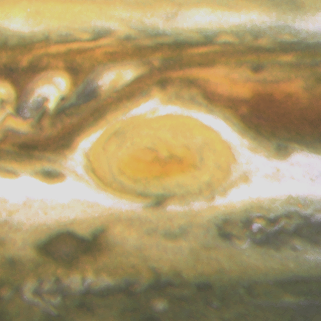

Jupiter's Great Red Spot

When 17th-century astronomers first turned their telescopes to Jupiter, they noted a conspicuous reddish spot on the giant planet. This Great Red Spot is still present in Jupiter's atmosphere, more than 300 years later. It is now known that it is a vast storm, spinning like a cyclone. Unlike a low-pressure hurricane in the Caribbean Sea, however, the Red Spot rotates in a counterclockwise direction in the southern hemisphere, showing that it is a high-pressure system. Winds inside this Jovian storm reach speeds of about 270 mph.

Credit: Hubble Heritage Team (STScI/AURA/NASA/ESA) and Amy Simon (Cornell U.)